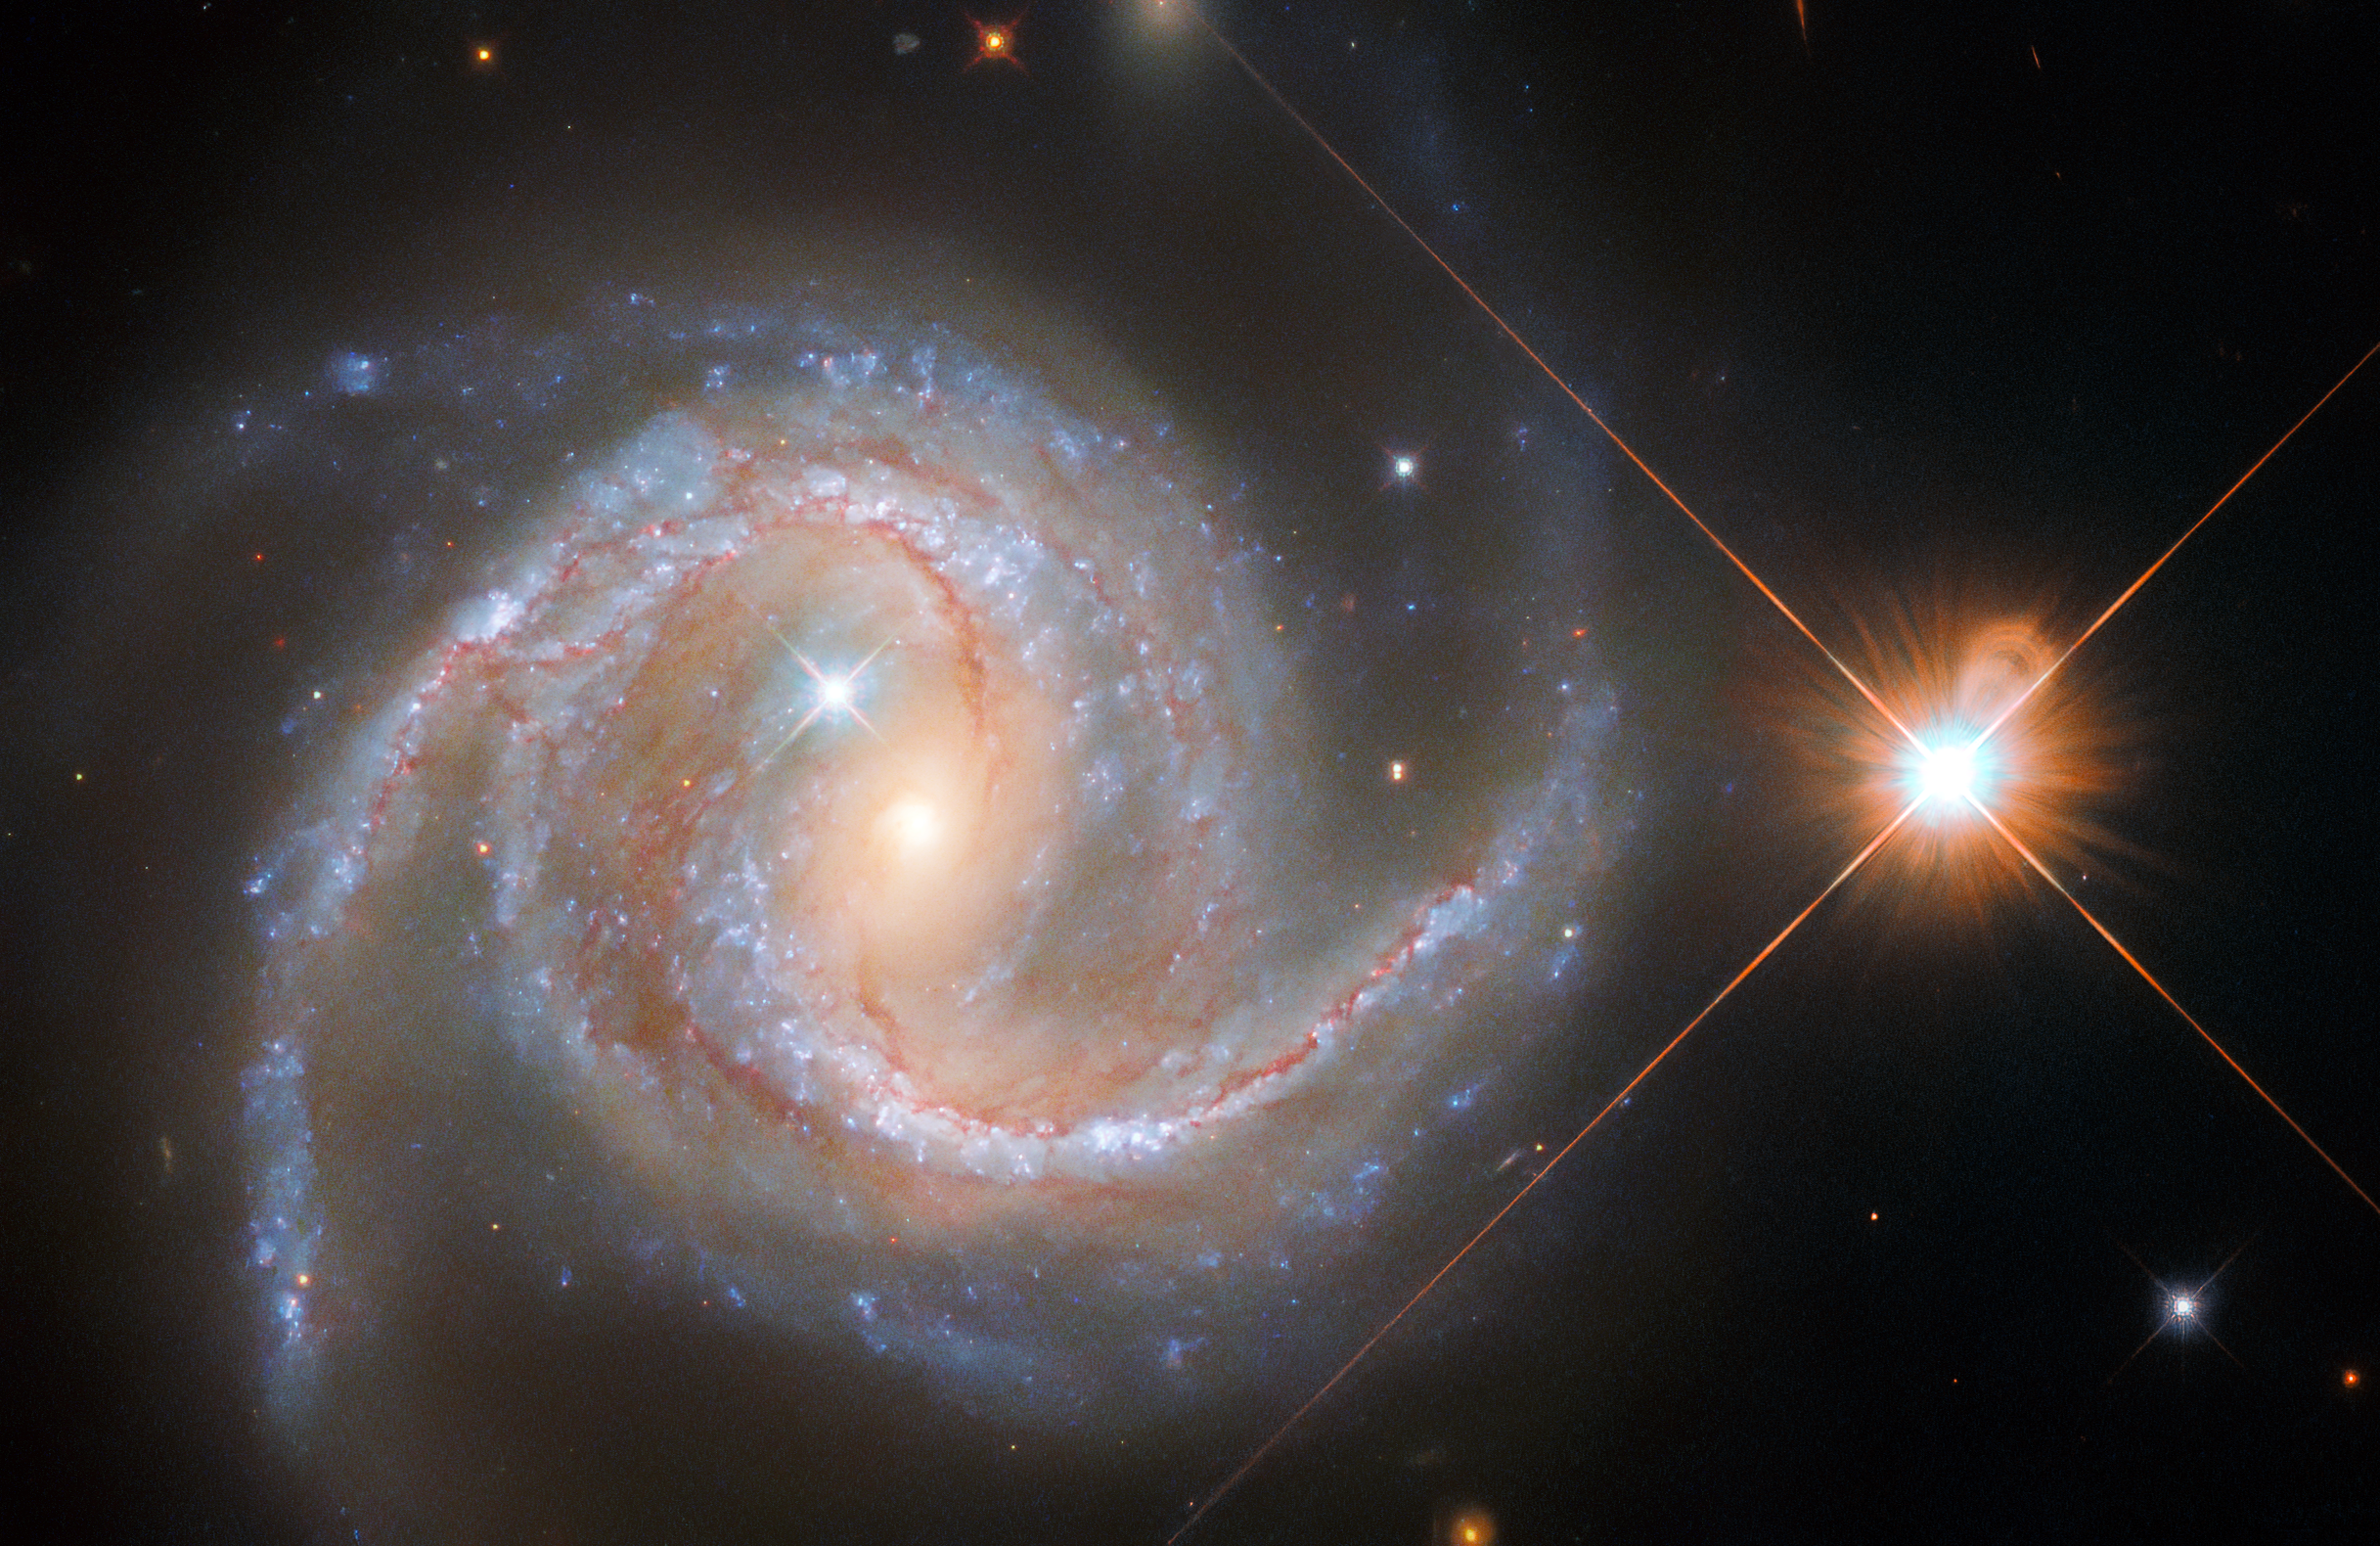

Hubble Spies a Stately Spiral Galaxy

The stately sweeping spiral arms of the spiral galaxy NGC 5495 are revealed by the NASA/ESA Hubble Space Telescope’s Wide Field Camera 3 in this image. NGC 5495, which lies around 300 million light-years from Earth in the constellation Hydra, is a Seyfert galaxy, a type of galaxy with a particularly bright central region. These luminous cores — known to astronomers as active galactic nuclei — are dominated by the light emitted by dust and gas falling into a supermassive black hole.

This image is drawn from a series of observations captured by astronomers studying supermassive black holes lurking in the hearts of other galaxies. Studying the central regions of galaxies can be challenging: as well as the light created by matter falling into supermassive black holes, areas of star formation and the light from existing stars all contribute to the brightness of galactic cores. Hubble’s crystal-clear vision helped astronomers disentangle the various sources of light at the core of NGC 5495, allowing them to precisely weigh its supermassive black hole.

As well as NGC 5495, two stellar interlopers are visible in this image. One is just outside the centre of NGC 5495, and the other is very prominent alongside the galaxy. While they share the same location on the sky, these objects are much closer to home than NGC 5495: they are stars from our own Milky Way. The bright stars are surrounded by criss-cross diffraction spikes, optical artefacts created by the internal structure of Hubble interacting with starlight.

Credit: ESA/Hubble & NASA, J. Greene Acknowledgement: R. Colombari